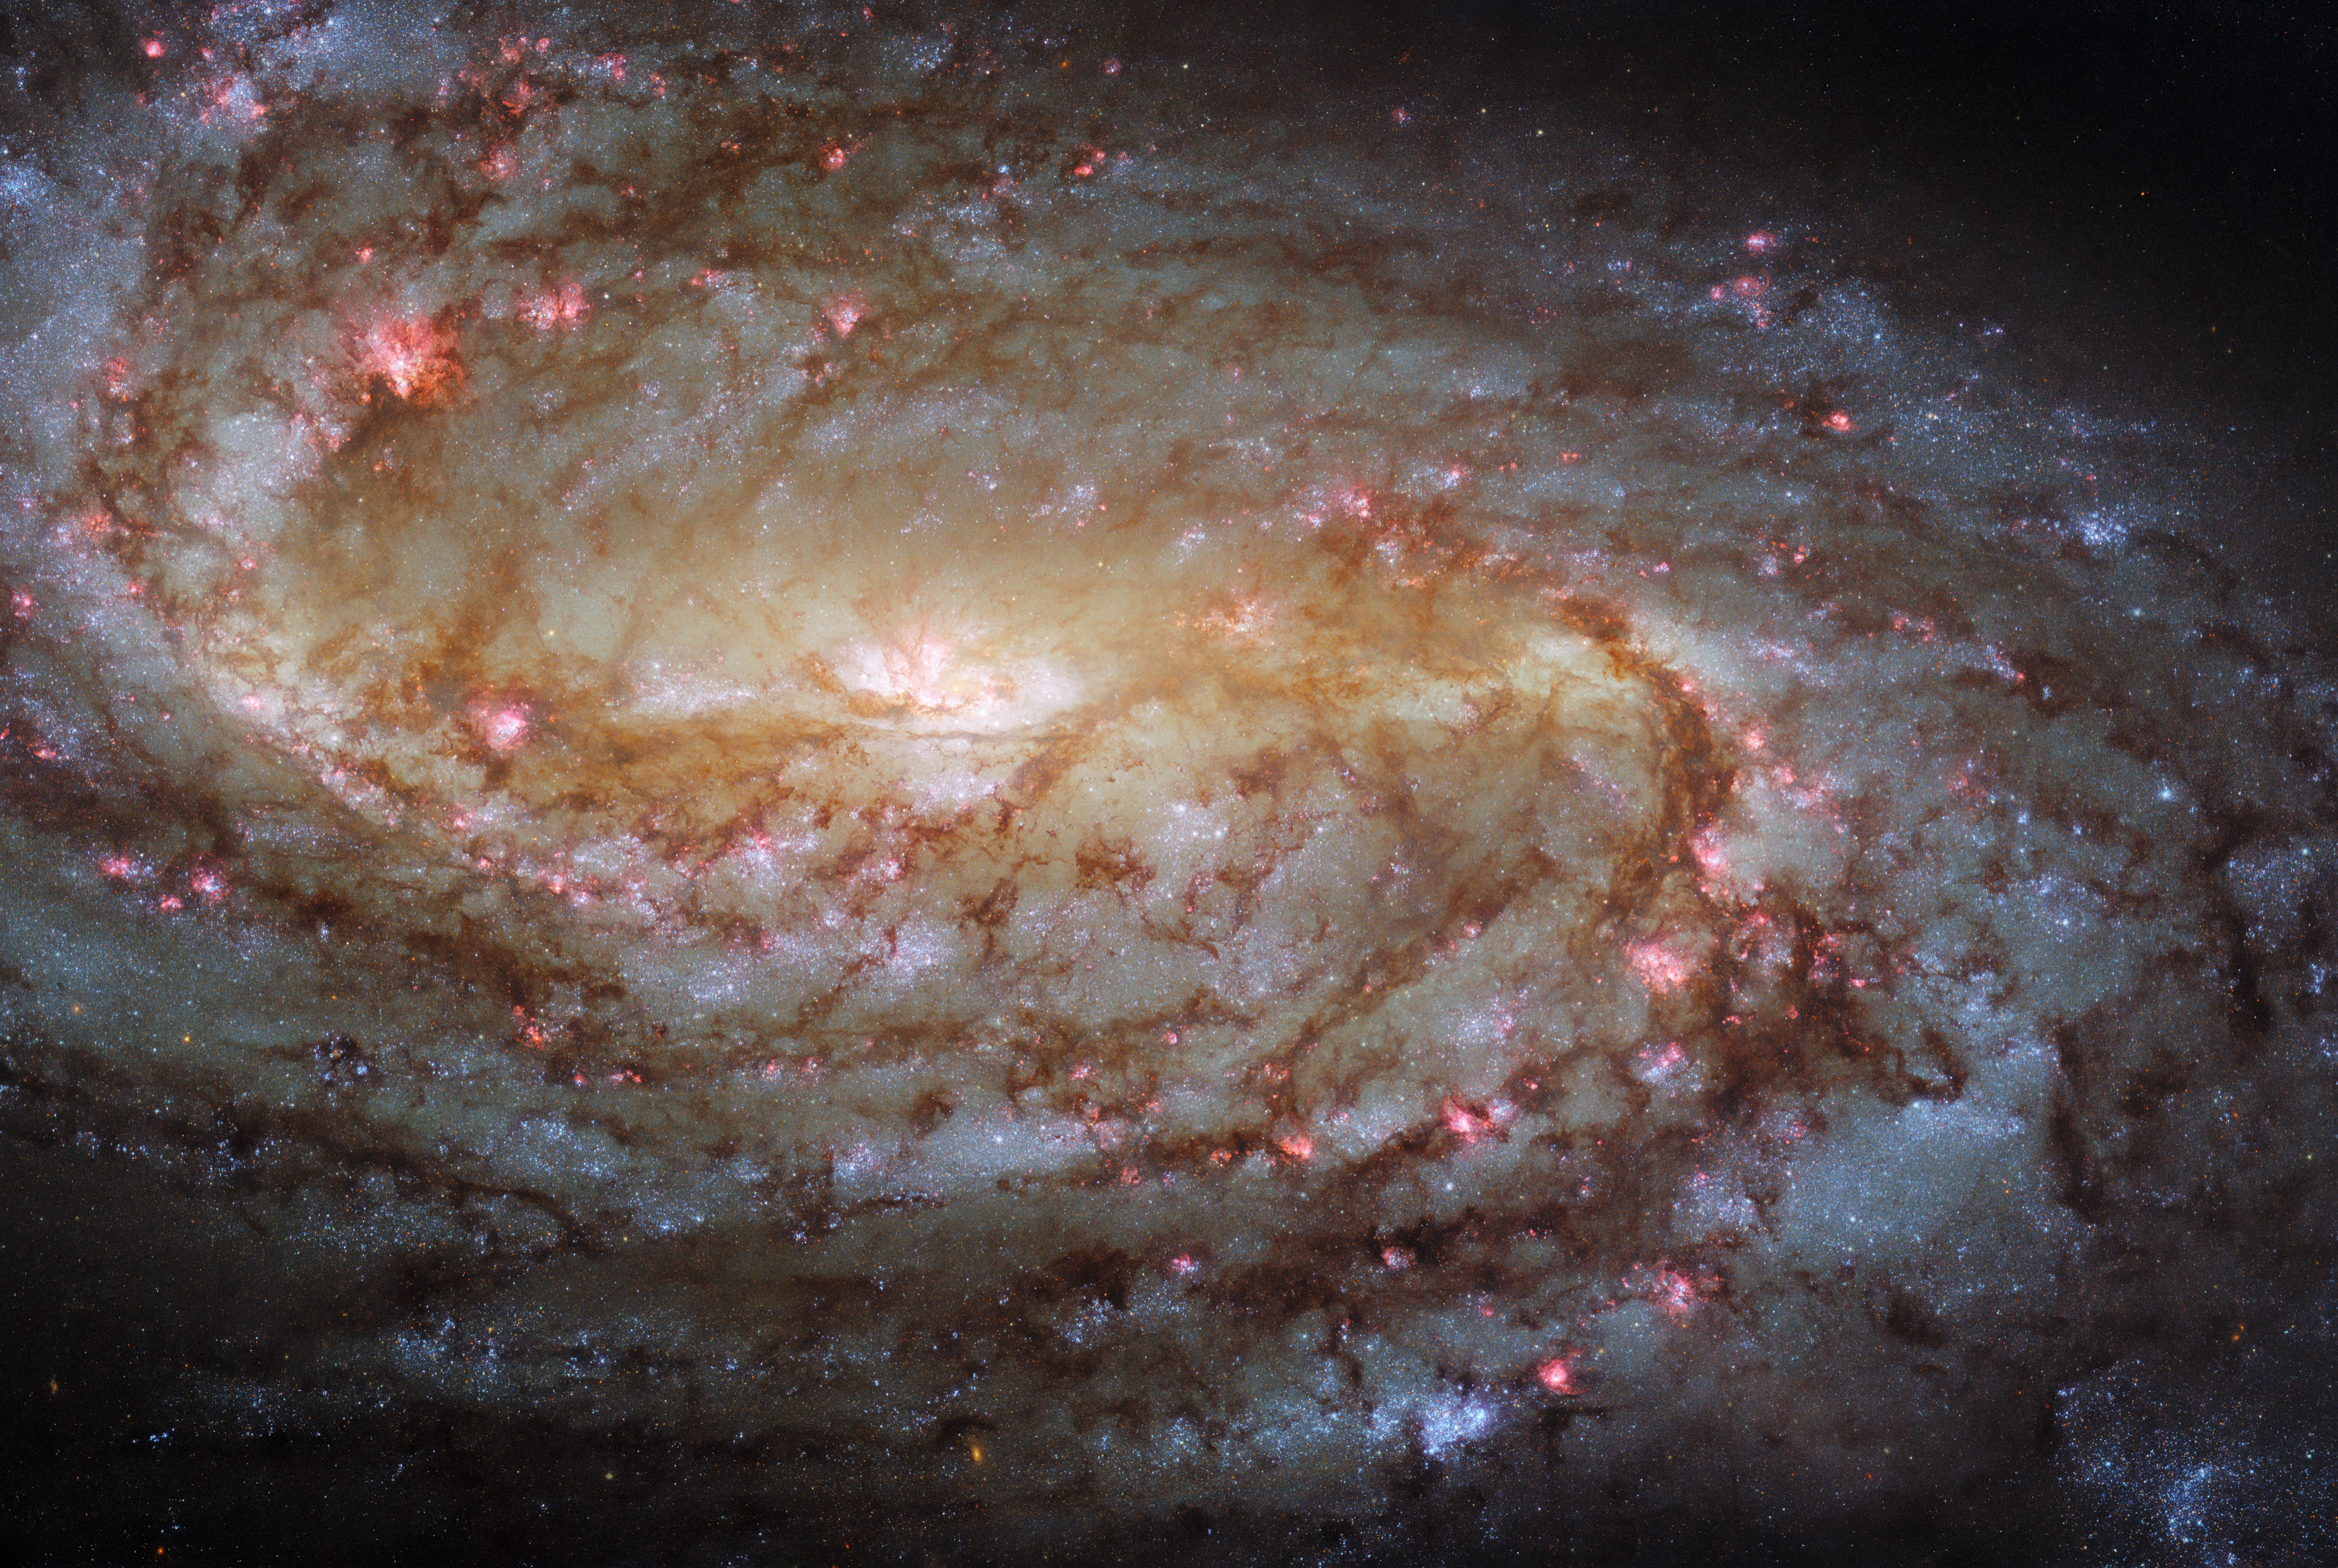

Hubble Experiences Déjà vu

This jewel-bright Picture of the Week features the spiral galaxy NGC 2903. This image was captured using Hubble’s Advanced Camera for Surveys (ACS) and Wide Field Camera 3 (WFC3), which were installed on Hubble in 2002 and 2009 respectively. Interestingly, Hubble has observed this particular galaxy before, in 2001, when neither the ACS or the WFC3 had yet been installed. The 2021 image boasts higher resolution, which means that NGC 2903 is more finely detailed than in the 2001 image. The ACS and WFC2 collectively cover a wide range of ultraviolet, optical and infrared wavelengths, which means that the 2021 image also has superior wavelength coverage to that of its 20-year-old predecessor. The 2001 image was taken using the Wide Field Planetary Camera 2 (WFPC2), which was Hubble’s workhorse instrument from 1993 until 2009 when it was replaced by the WFC3.

Hubble has a long and fascinating history of crewed service missions, which were performed in order to correct for imperfections in Hubble’s mirror, to update Hubble’s technical systems, and to remove old instruments and install new ones. One of Hubble’s most remarkable features is it’s incredible longevity, and this would not have been possible with the great success of the servicing missions. The juxtaposition of the 2001 and 2021 images of NGC 2903 — both remarkable images for their time — highlights the value of a stable, accessible platform in space that can reliably collect data, not only year after year, but decade after decade.

Credit: ESA/Hubble & NASA, L. Ho, J. Lee and the PHANGS-HST Team